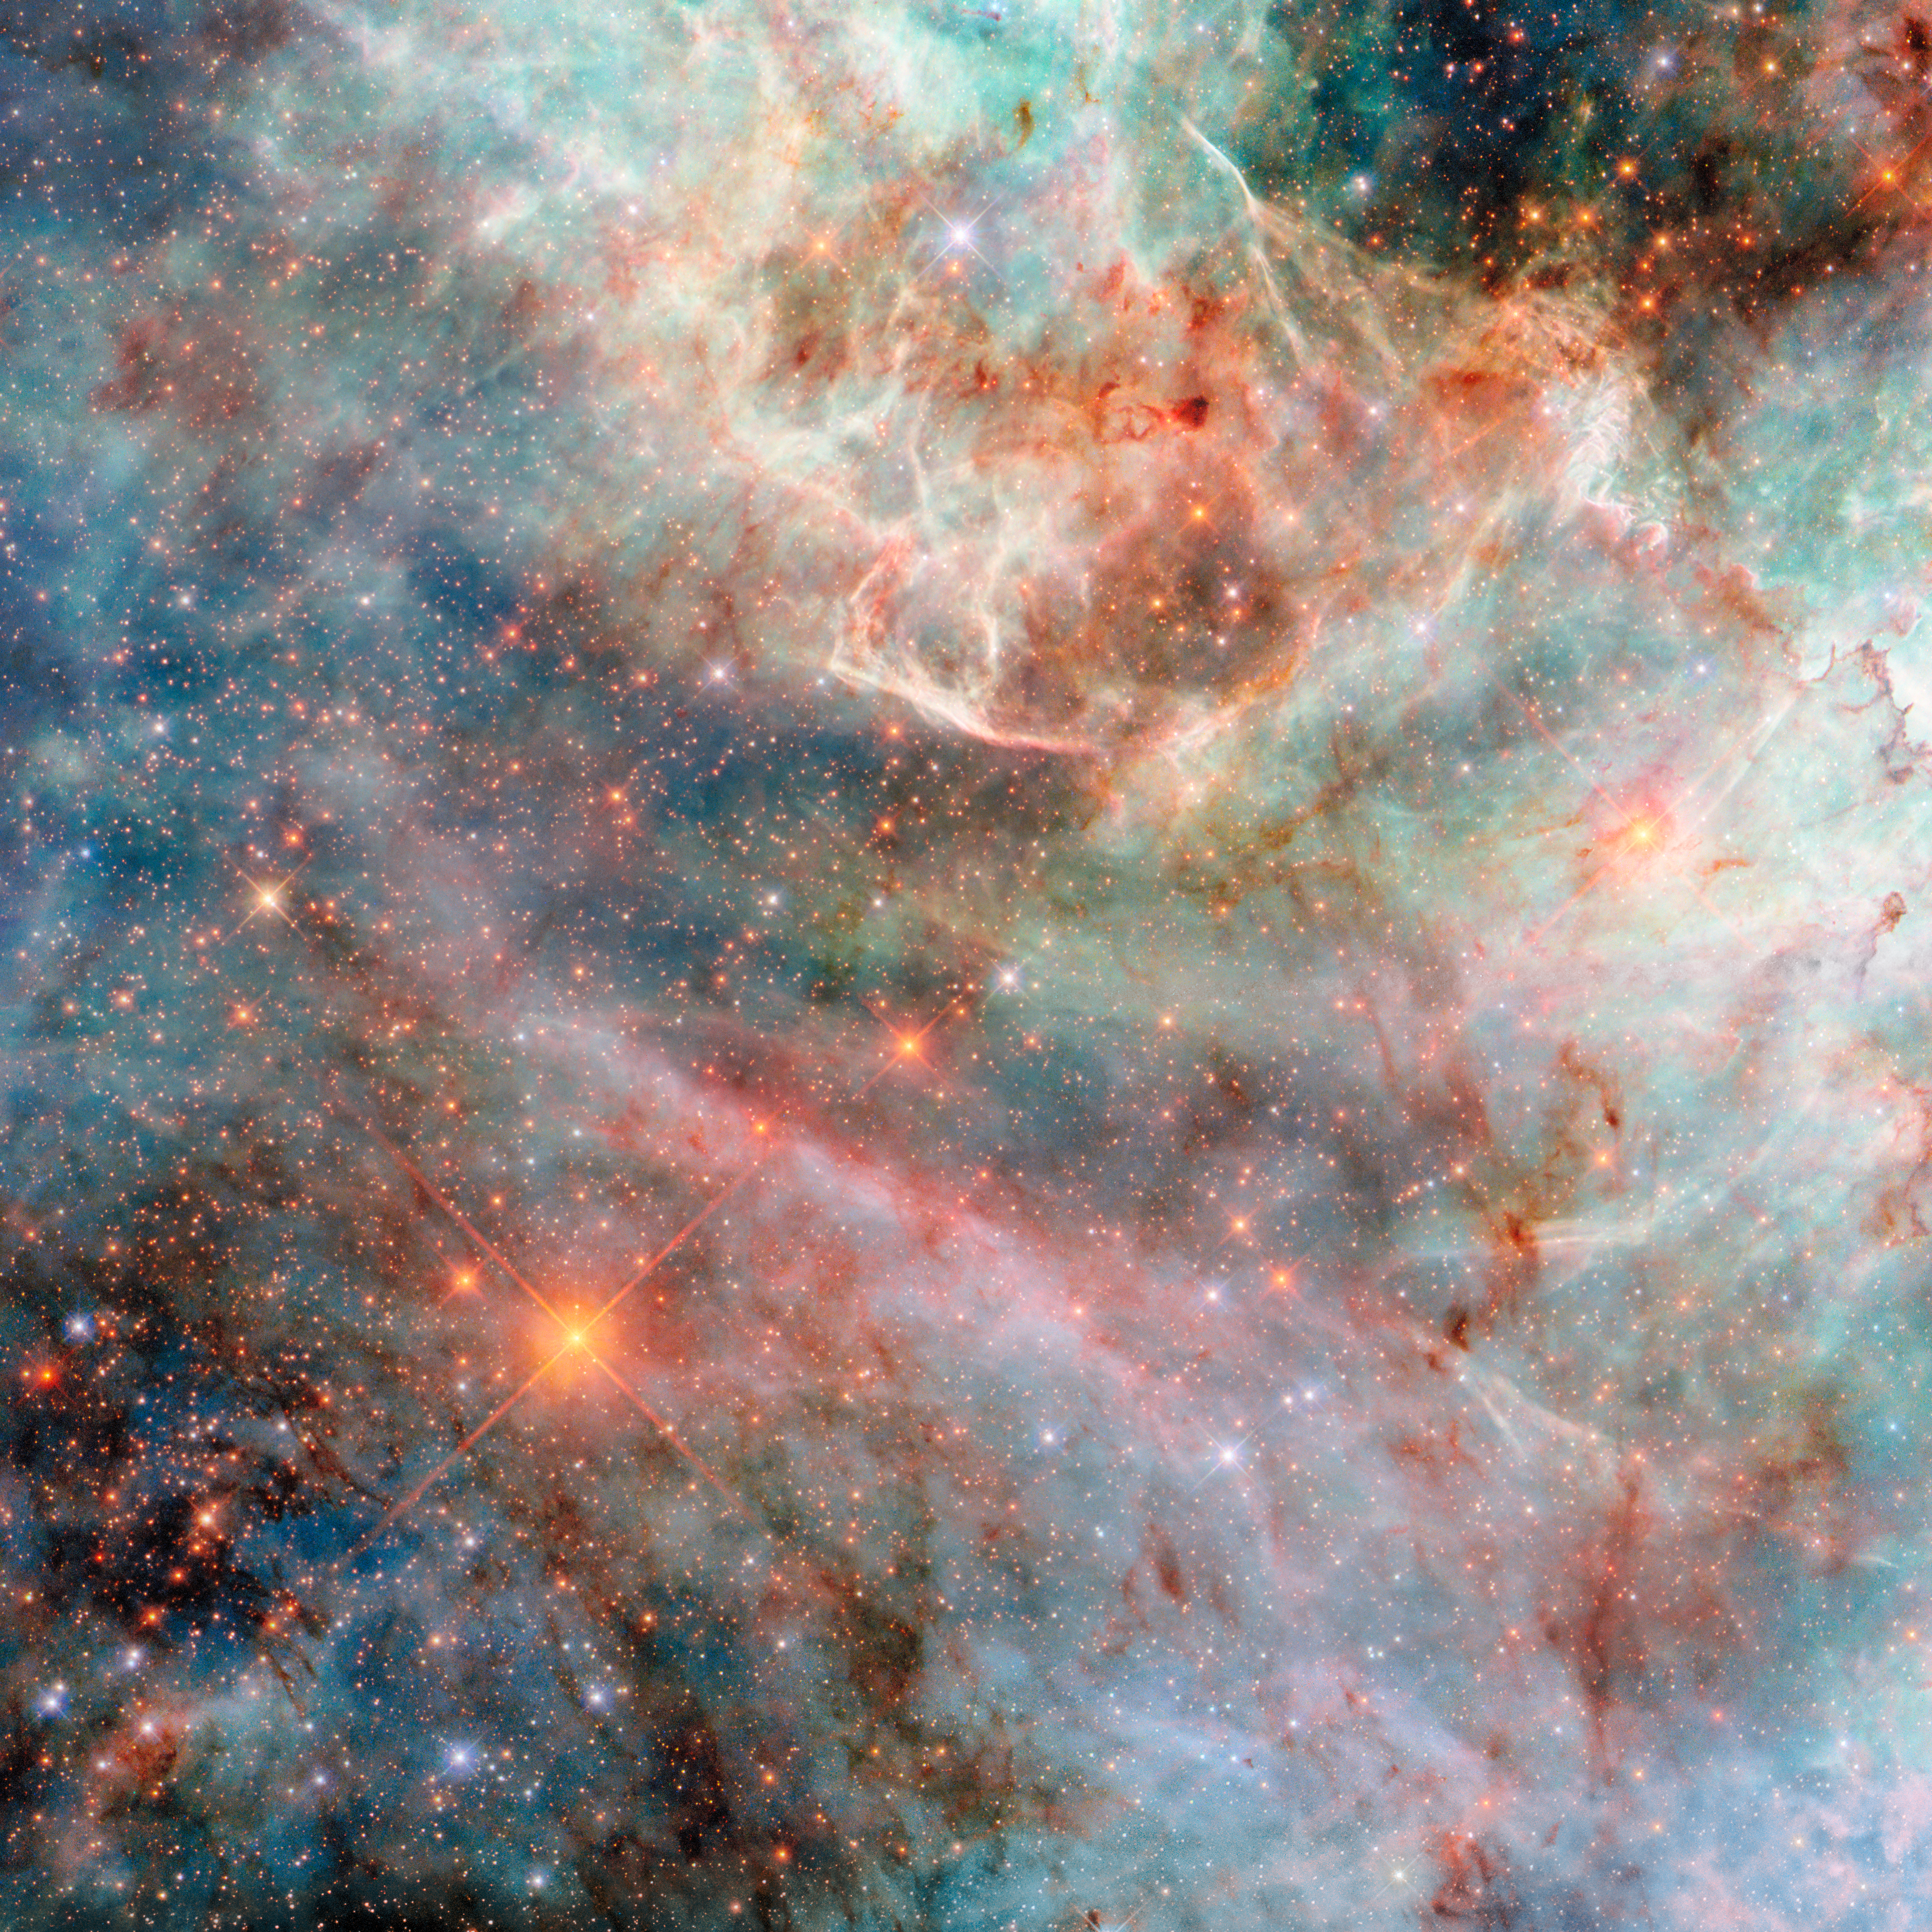

Capturing candyfloss clouds

Today’s NASA/ESA Hubble Space Telescope Picture of the Week features a sparkling cloudscape from one of the Milky Way’s galactic neighbours, a dwarf galaxy called the Large Magellanic Cloud. Located 160 000 light-years away in the constellations Dorado and Mensa, the Large Magellanic Cloud is the largest of the Milky Way’s many small satellite galaxies.

This view of dusty gas clouds in the Large Magellanic Cloud is possible thanks to Hubble’s cameras, such as the Wide Field Camera 3 (WFC3) that was used to collect the observations for this image. WFC3 is equipped with a variety of filters, each of which lets through only specific wavelengths, or colours, of light. This image combines observations made with five different filters, including some that capture ultraviolet and infrared light that the human eye cannot see.

The wispy gas clouds in this image resemble brightly coloured candyfloss. When viewing such a vividly coloured cosmic scene, it is natural to wonder whether the colours are ‘real’. After all, Hubble, with its 2.4 metre-wide mirror and advanced scientific instruments, doesn’t bear resemblance to a typical camera! When image-processing specialists combine raw filtered data into a multi-coloured image like this one, they assign a colour to each filter. Visible-light observations are typically matched to the colour that the filter allows through. Shorter wavelengths of light such as ultraviolet are usually coloured blue or purple, while longer wavelengths like infrared are typically coloured red.

This colour scheme closely represents reality while adding new information from the portions of the electromagnetic spectrum that humans cannot see. However, there are endless possible colour combinations that can be employed to achieve an especially aesthetically pleasing or scientifically insightful image.

Credit: ESA/Hubble & NASA, C. Murray